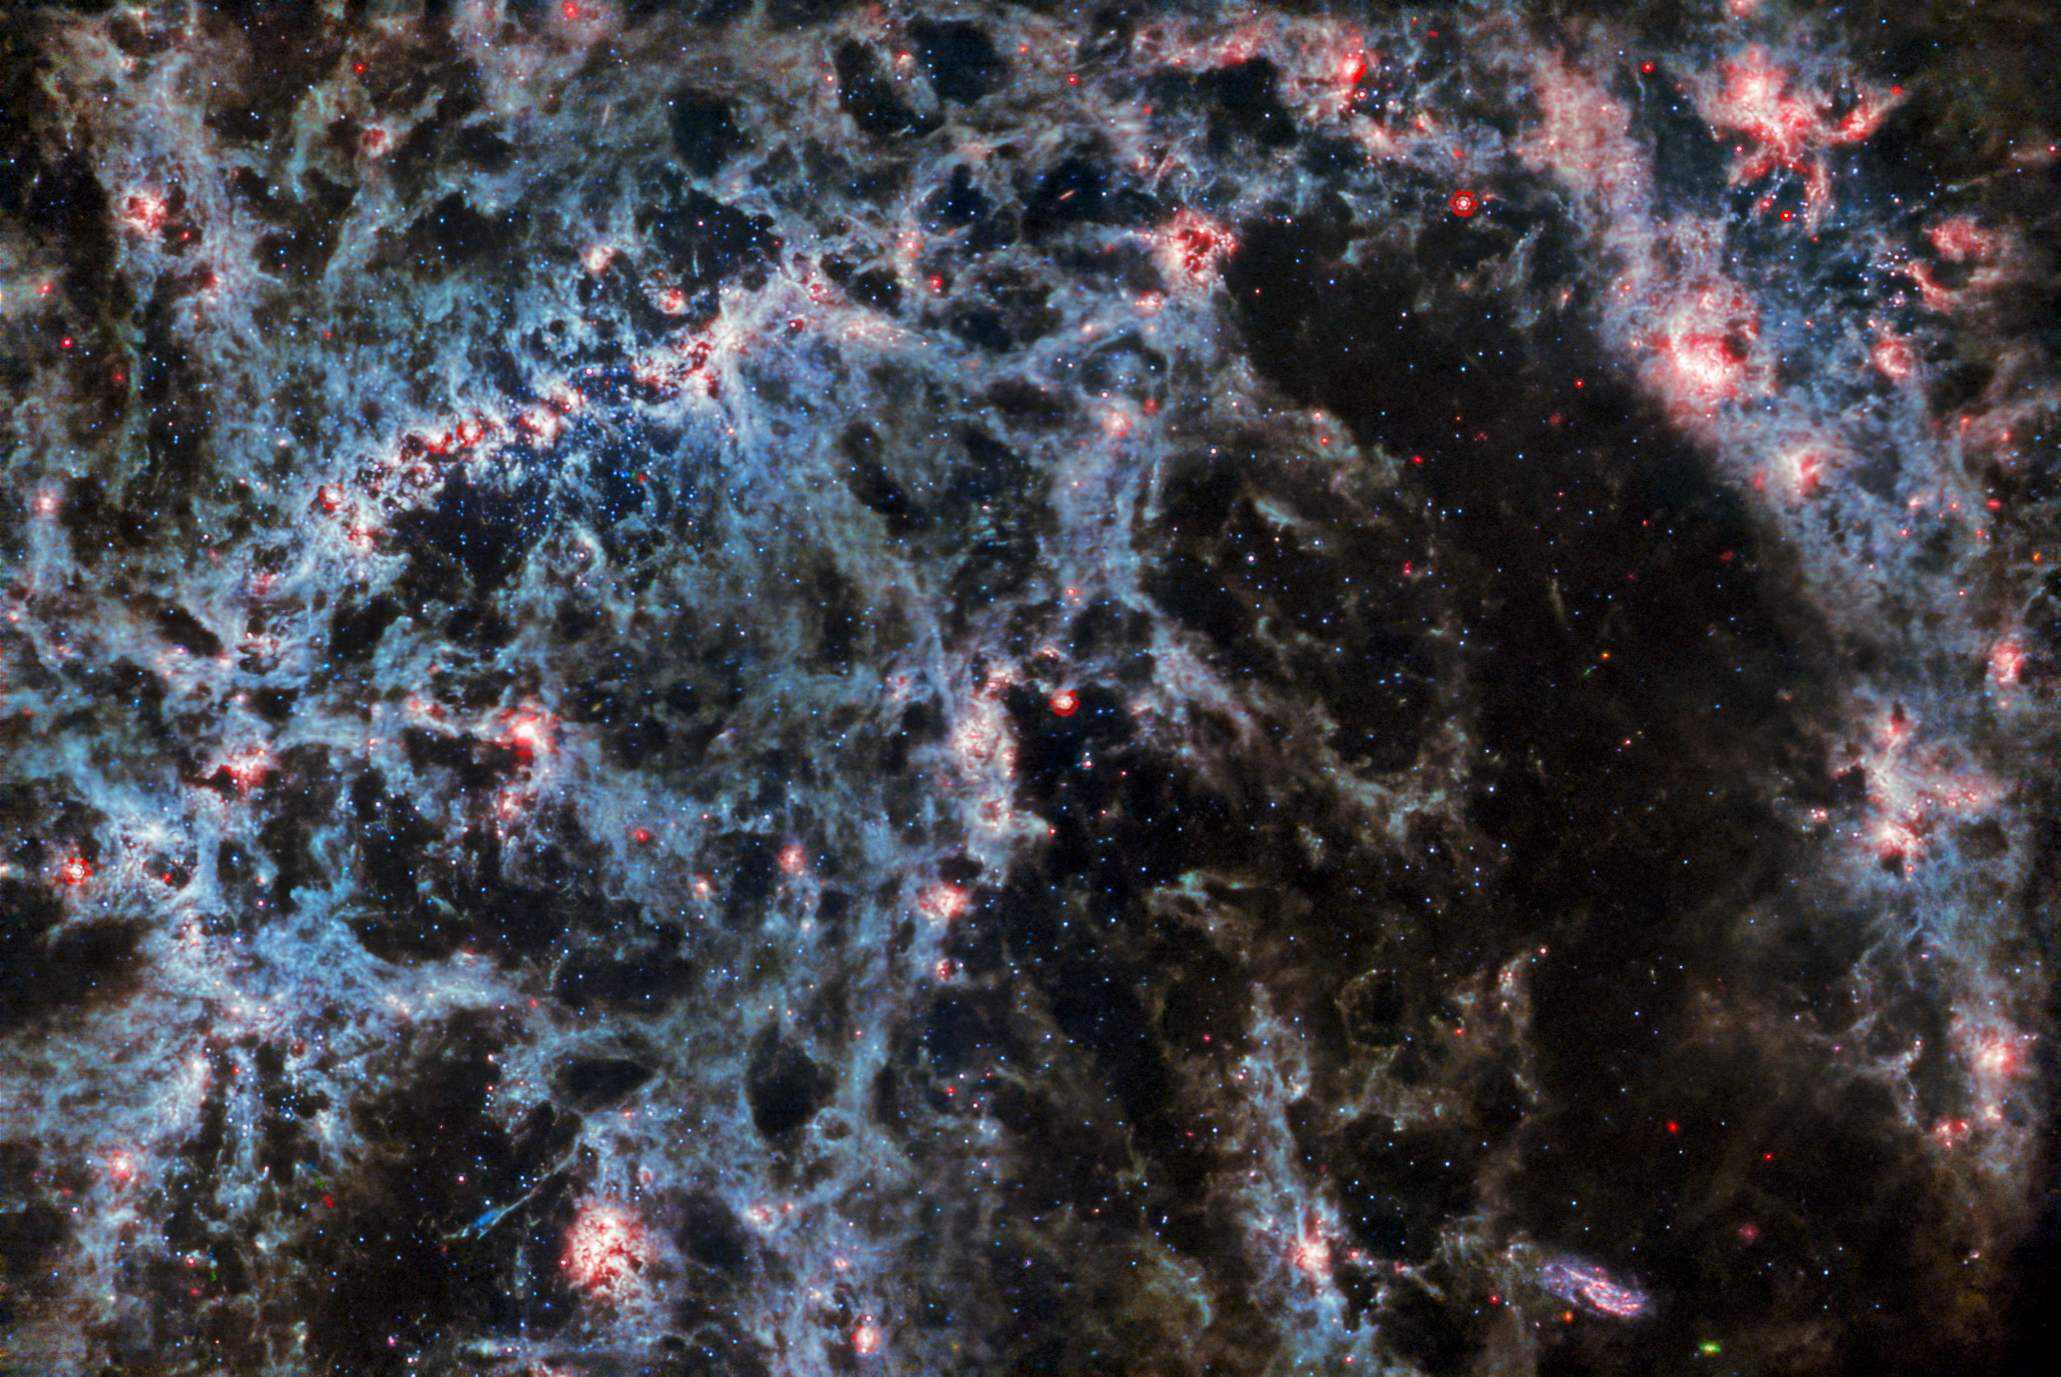

Webb's MIRI peers behind bars

A delicate tracery of dust and bright star clusters threads across this image from the NASA/ESA/CSA James Webb Space Telescope. In this image, from Webb’s MIRI instrument, the dusty structure of the spiral galaxy and glowing bubbles of gas containing newly-formed star clusters are particularly prominent. These bright tendrils of gas belong to the barred spiral galaxy NGC 5068, located around 17 million light-years from Earth in the constellation Virgo.

This portrait of NGC 5068 is part of a campaign to create an astronomical treasure trove, a repository of observations of star formation in nearby galaxies. Previous gems from this collection can be seen here and here. These observations are particularly valuable to astronomers for two reasons. The first is because star formation underpins so many fields in astronomy, from the physics of the tenuous plasma that lies between stars to the evolution of entire galaxies. By observing the formation of stars in nearby galaxies, astronomers hope to kick-start major scientific advances with some of the first available data from Webb.

The second reason is that Webb’s observations build on other studies using telescopes including the NASA/ESA Hubble Space Telescope and some of the world’s most capable ground-based observatories. Webb collected images of 19 nearby star-forming galaxies which astronomers could then combine with catalogues from Hubble of 10 000 star clusters, spectroscopic mapping of 20 000 star-forming emission nebulae from the Very Large Telescope (VLT), and observations of 12 000 dark, dense molecular clouds identified by the Atacama Large Millimeter/submillimeter Array (ALMA). These observations span the electromagnetic spectrum and give astronomers an unprecedented opportunity to piece together the minutiae of star formation.

Three asteroid trails intrude into this image, visible as tiny blue-green-red dots. Asteroids appear in astronomical images such as these because they are much closer to the telescope than the distant target. As Webb captures several images of the astronomical object, the asteroid moves, so it shows up in a slightly different place in each frame. They are a little more noticeable in images such as this one from MIRI, because many stars are not as bright in mid-infrared wavelengths as they are in near-infrared or visible light, so asteroids are easier to see next to the stars. One trail lies just below the galaxy’s bar, and two more in the bottom-left corner - can you spot them?

Credit: ESA/Webb, NASA & CSA, J. Lee and the PHANGS-JWST Team